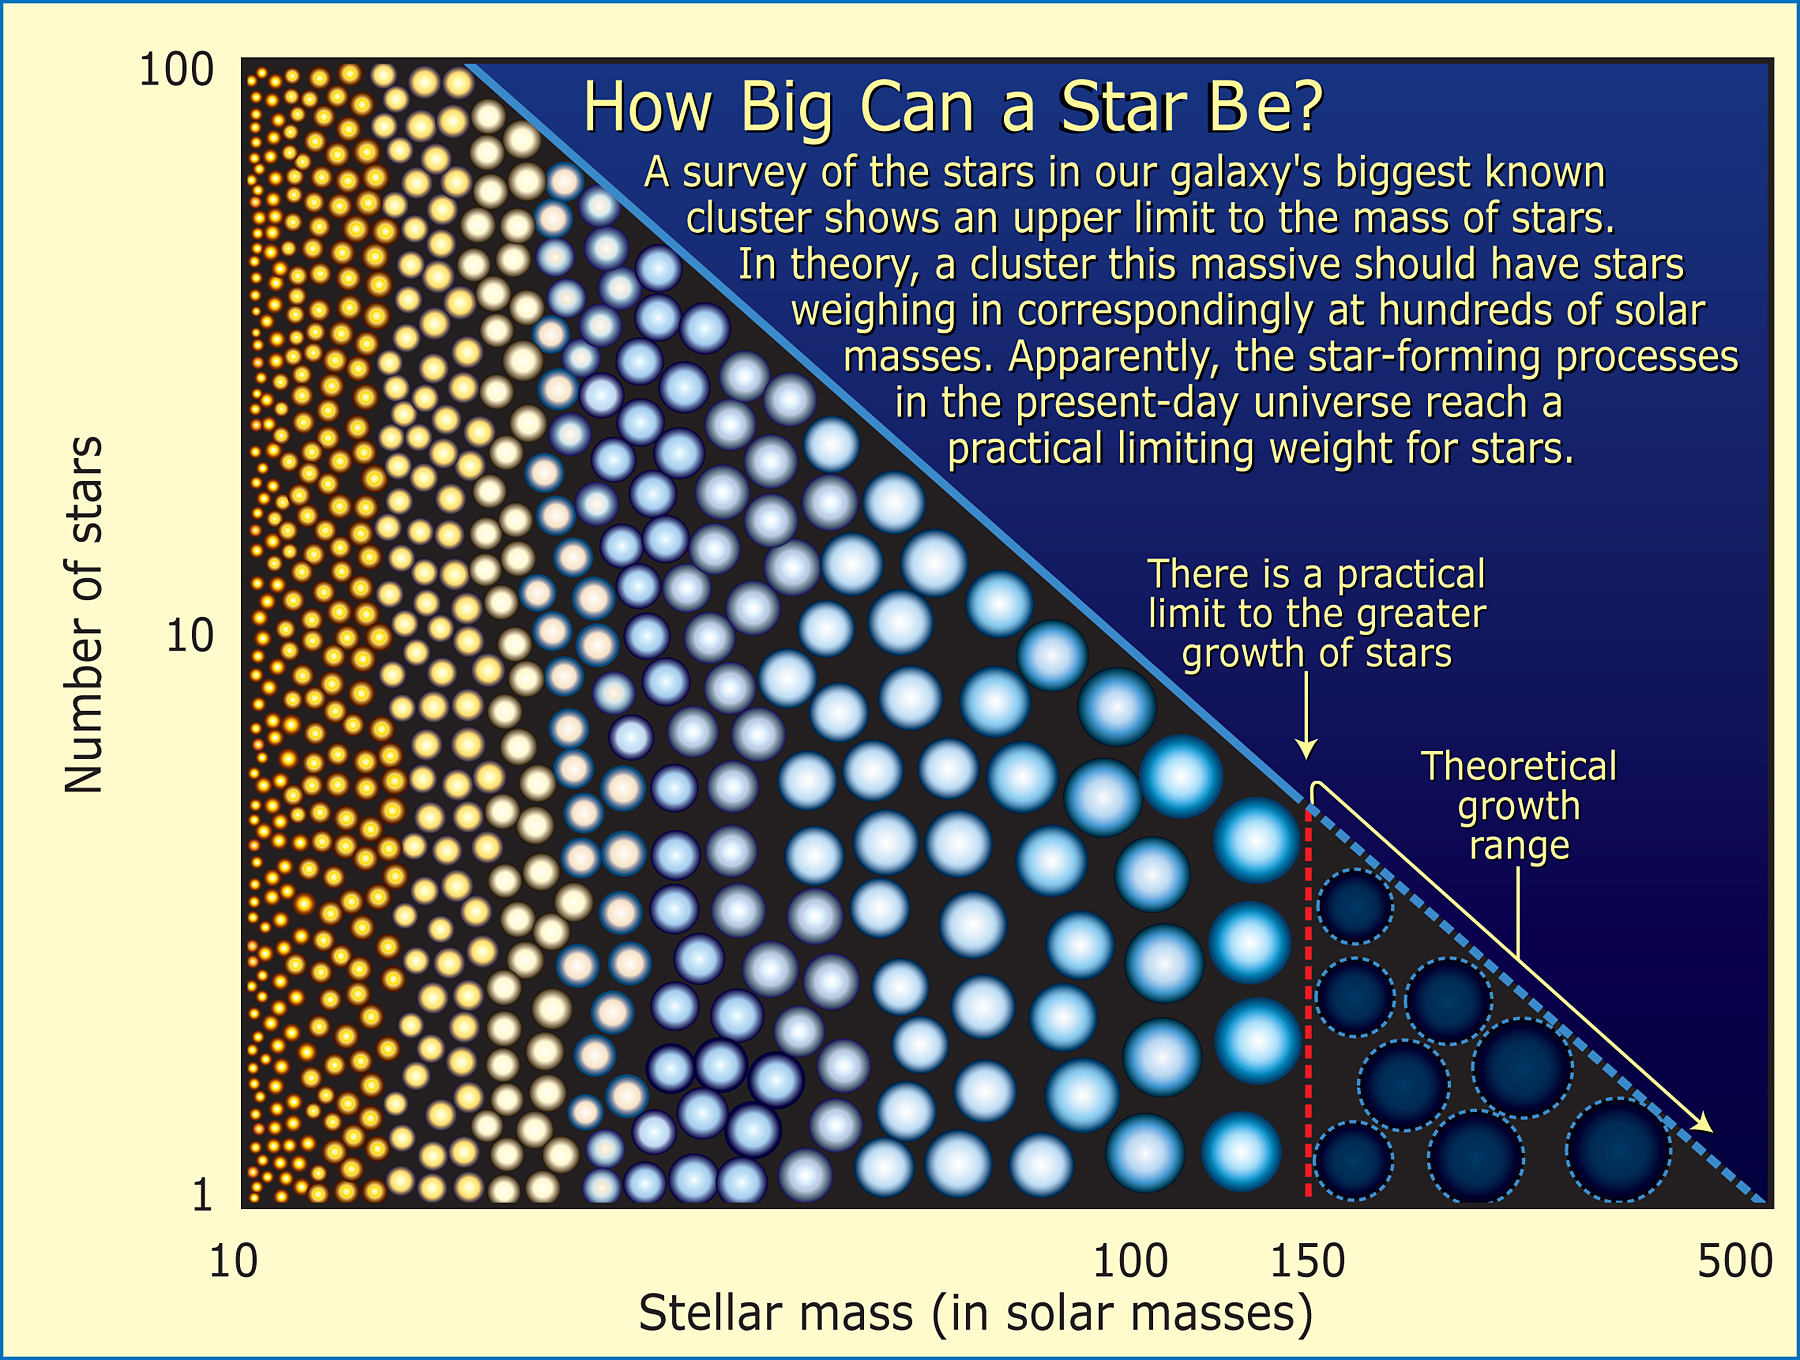

How Big Can a Star Be?

Studying the densest known cluster of stars in our galaxy, the Arches cluster, astronomers determined that stars are not created any larger than about 150 times the mass of our Sun, or 150 solar masses.

Credit: NASA, ESA and A. Feild (STScI)